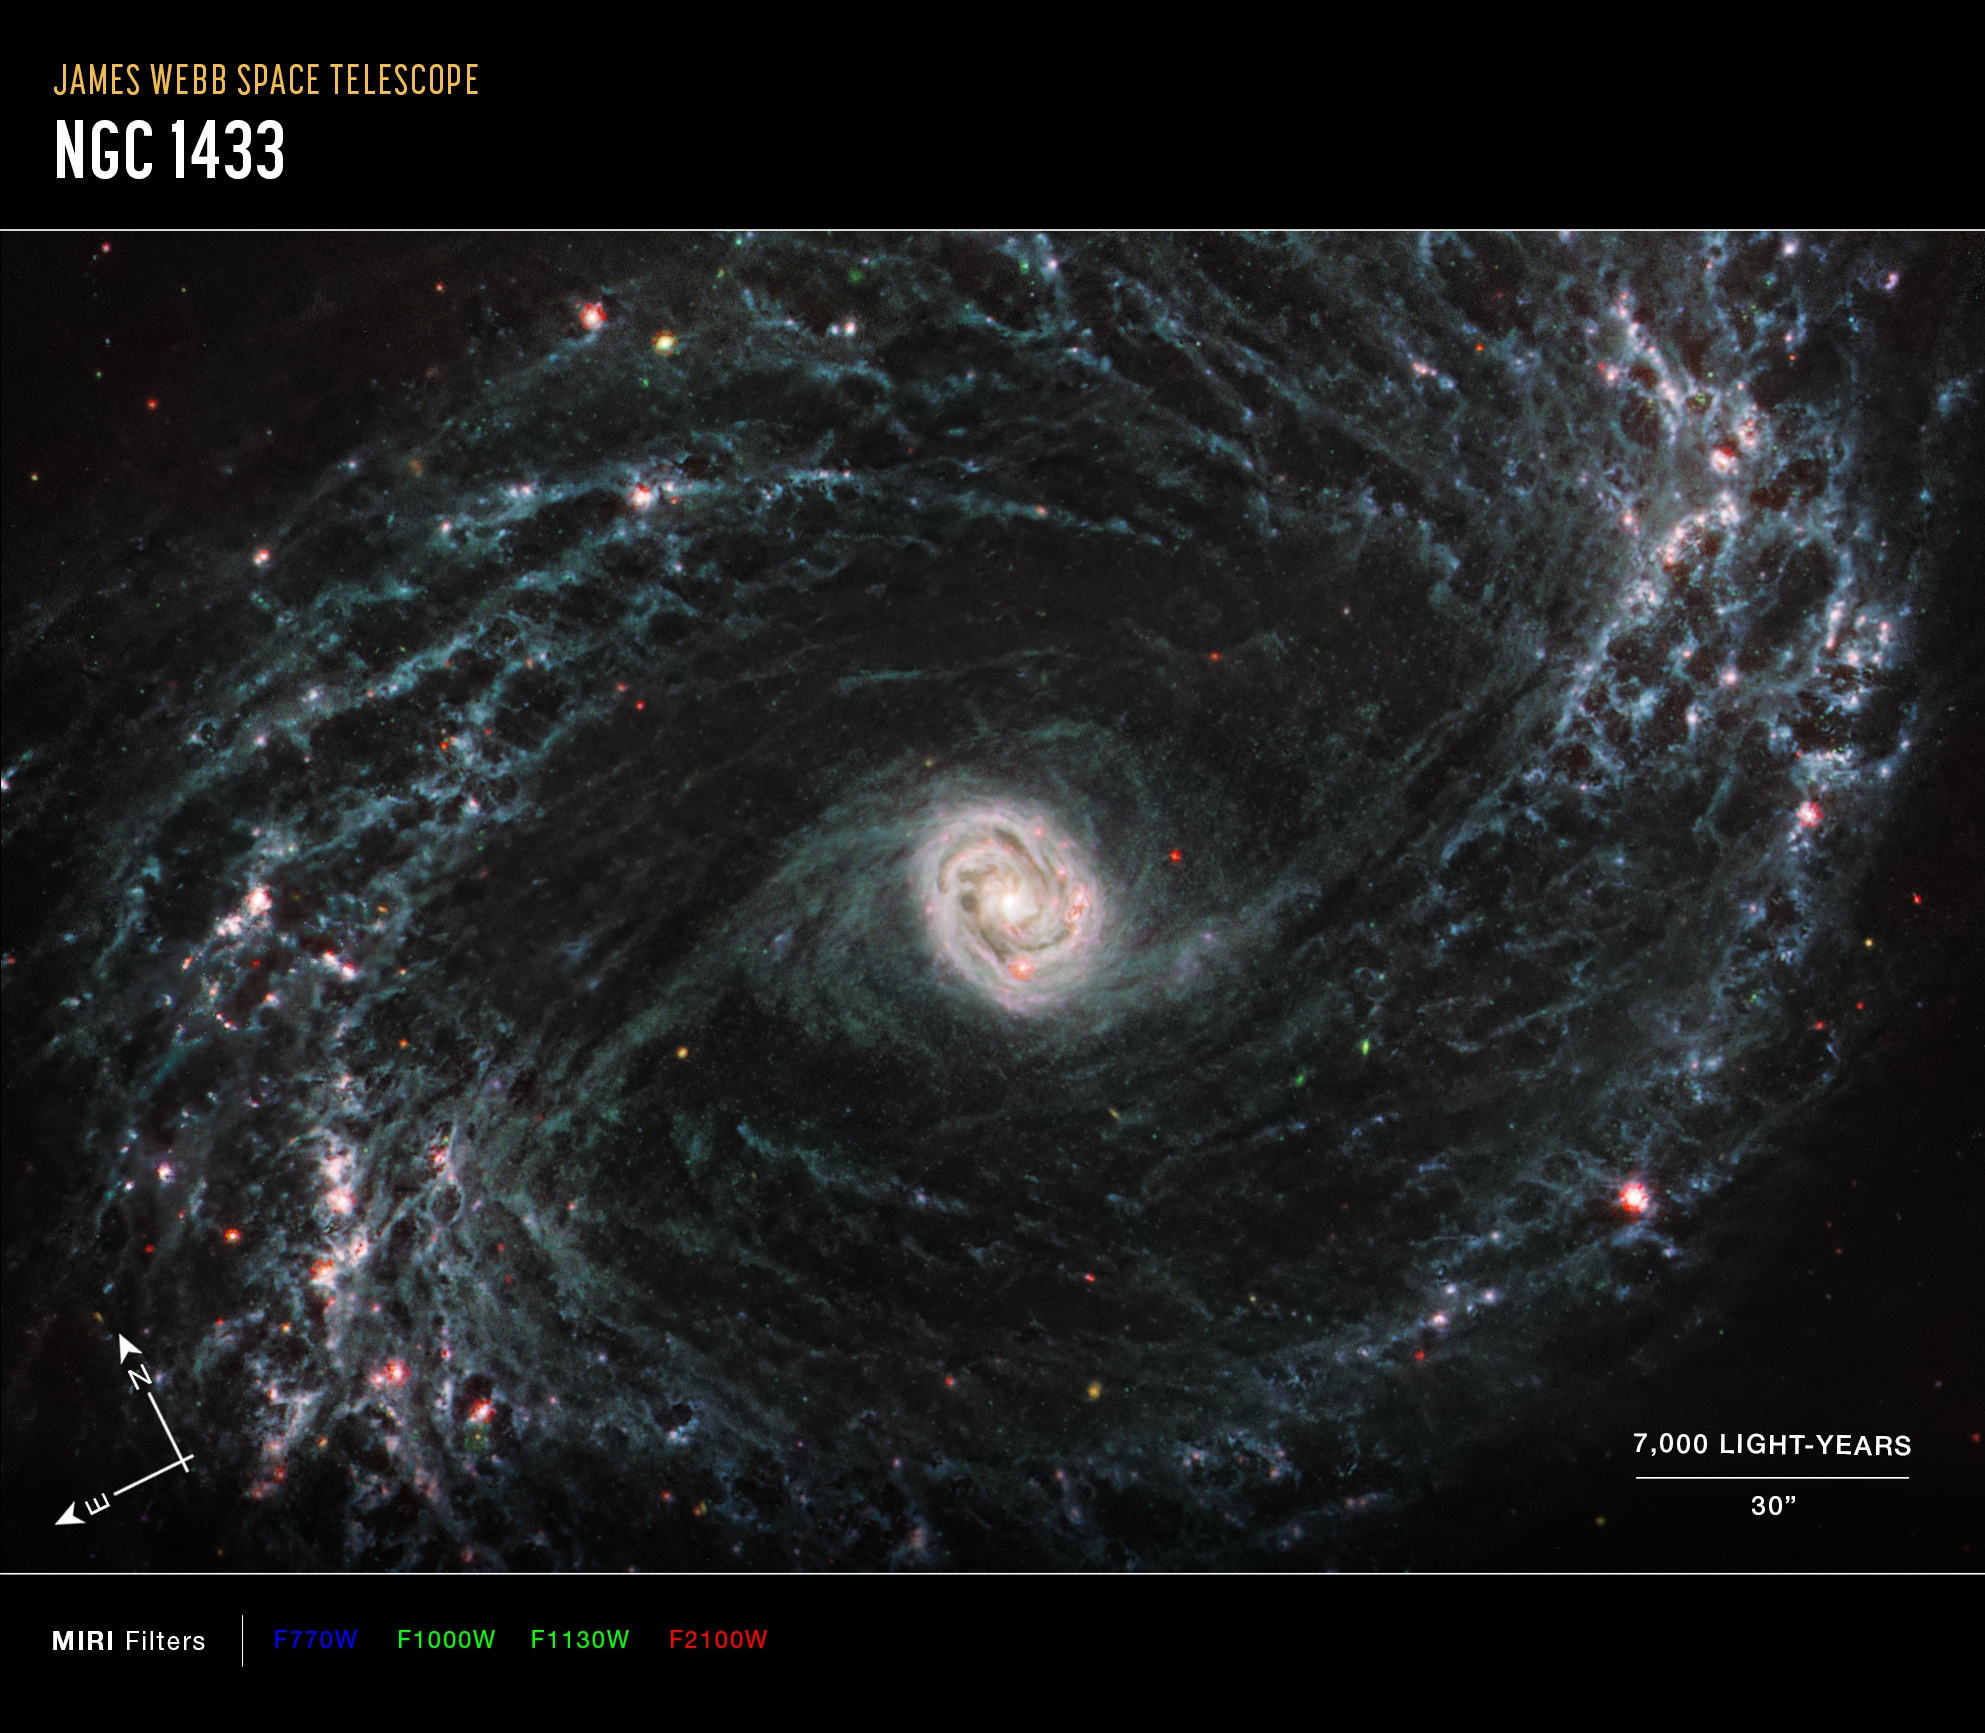

NGC 1433 (MIRI Image - Annotated)

This image of the nearby galaxy NGC 1433, captured by Webb’s Mid-Infrared Instrument (MIRI) shows compass arrows, scale bar, and color key for reference.

The north and east compass arrows show the orientation of the image on the sky. Note that the relationship between north and east on the sky (as seen from below) is flipped relative to direction arrows on a map of the ground (as seen from above). At the lower right is a scale bar labeled 7,000 light-years, 30 arcseconds. The length of the scale bar is approximately one-fifth the total width of the image. Below the image is a color key showing which MIRI filters were used to create the image and which visible-light color is assigned to each filter. In the image of NGC 1433, blue, green, and red were assigned to Webb’s MIRI data at 7.7, 10 and 11.3, and 21 microns (the F770W, F1000W and F1130W, and F2100W filters, respectively).

This image taken by the NASA/ESA/CSA James Webb Space Telescope shows one of a total of 19 galaxies targeted for study by the Physics at High Angular resolution in Nearby Galaxies (PHANGS) collaboration. Nearby barred spiral galaxy NGC 1433 takes on a completely new look when observed by Webb’s Mid-Infrared Instrument (MIRI).

NGC 1433’s spiral arms are littered with evidence of extremely young stars releasing energy and, in some cases, blowing out the gas and dust of the interstellar medium they plough into. Areas that once appeared dark and dim in optical imaging light up under Webb’s infrared eye, as clumps of dust and gas in the interstellar medium absorb the light from forming stars and emit it back out in the infrared.

Webb’s image of NGC1433 is a dramatic display of the role that dynamic processes within the forming stars, dust, and gas play in the larger structure of an entire galaxy.

At the centre of the galaxy, a tight, bright core featuring a unique double ring structure shines in exquisite detail, revealed by Webb’s extreme resolution. In this case, that double ring is actually tightly wrapped spiral arms that wind into an oval shape along the galaxy’s bar axis.

NGC 1433 is classified as a Seyfert galaxy, a galaxy relatively close to Earth that has a bright, active core. The brightness and lack of dust in the MIRI image of NGC 1433 could hint at a recent merger or even collision with another galaxy.

MIRI was contributed by ESA and NASA, with the instrument designed and built by a consortium of nationally funded European Institutes (The MIRI European Consortium) and NASA’s Jet Propulsion Laboratory, in partnership with the University of Arizona.

Credit: NASA, ESA, CSA, and J. Lee (NOIRLab), A. Pagan (STScI)